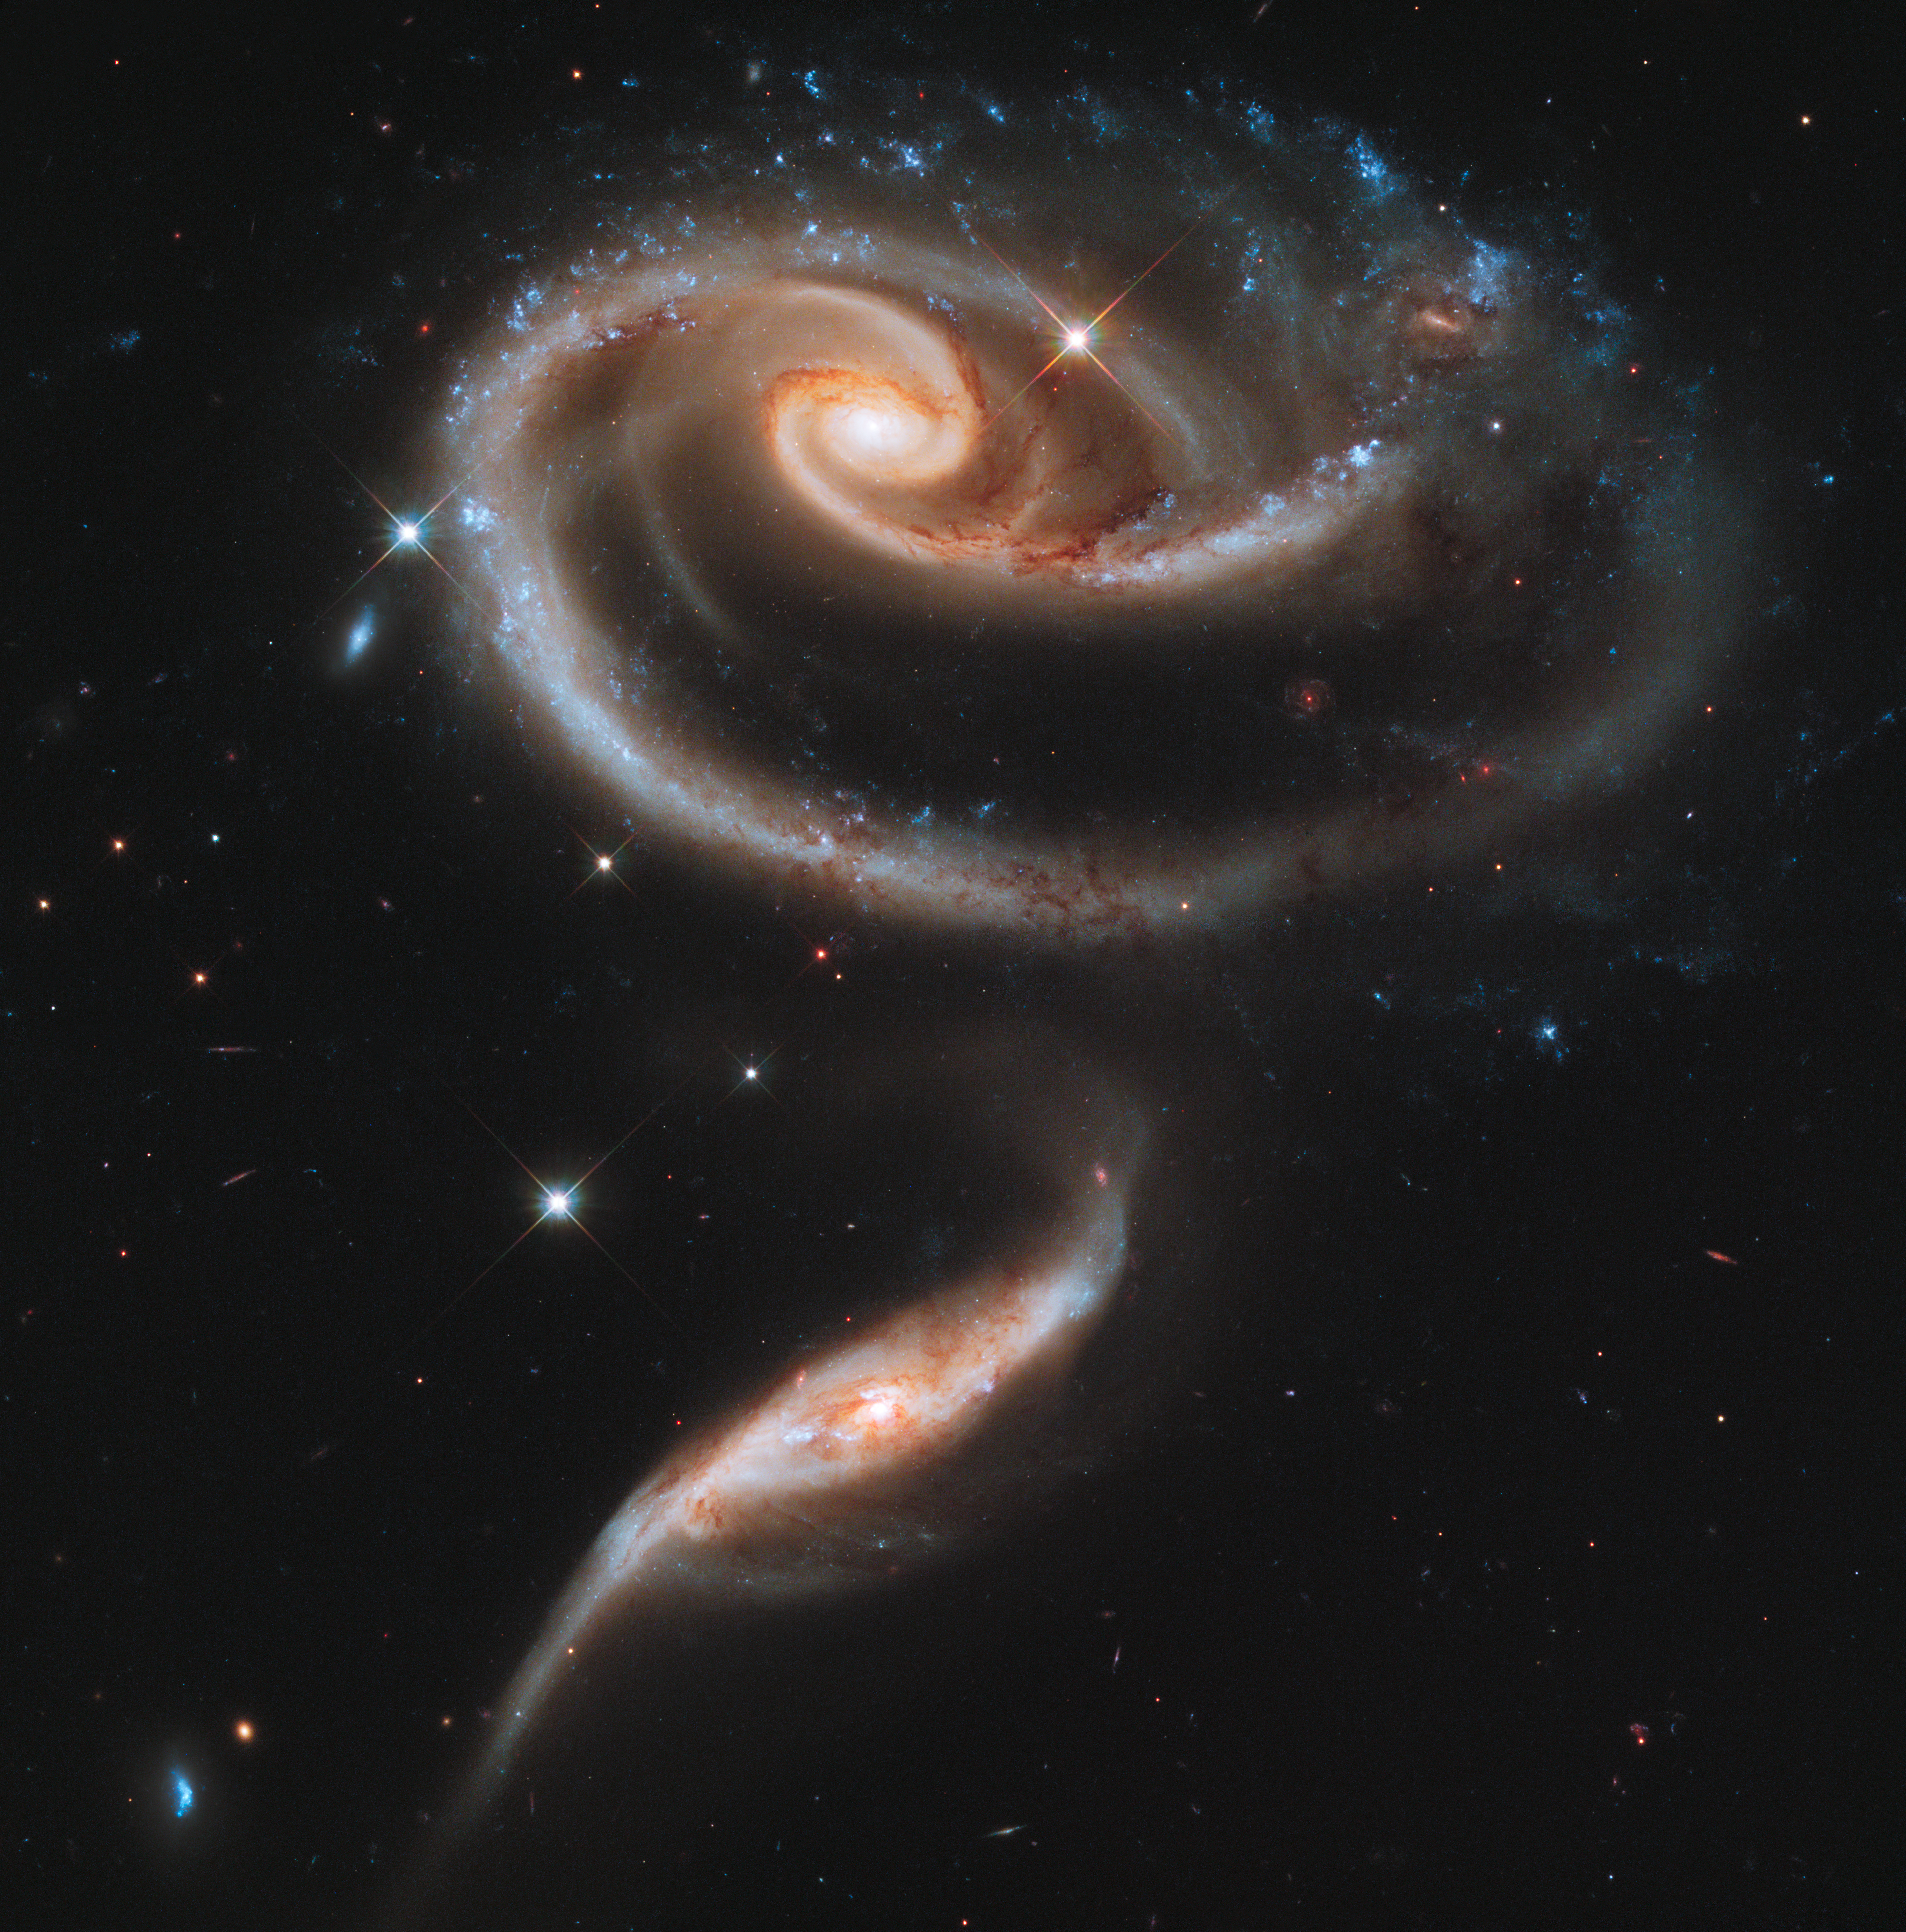

A rose made of galaxies

This image of a pair of interacting galaxies called Arp 273 was released to celebrate the 21st anniversary of the launch of the NASA/ESA Hubble Space Telescope.

The distorted shape of the larger of the two galaxies shows signs of tidal interactions with the smaller of the two. It is thought that the smaller galaxy has actually passed through the larger one.

Credit: NASA, ESA and the Hubble Heritage Team (STScI/AURA)